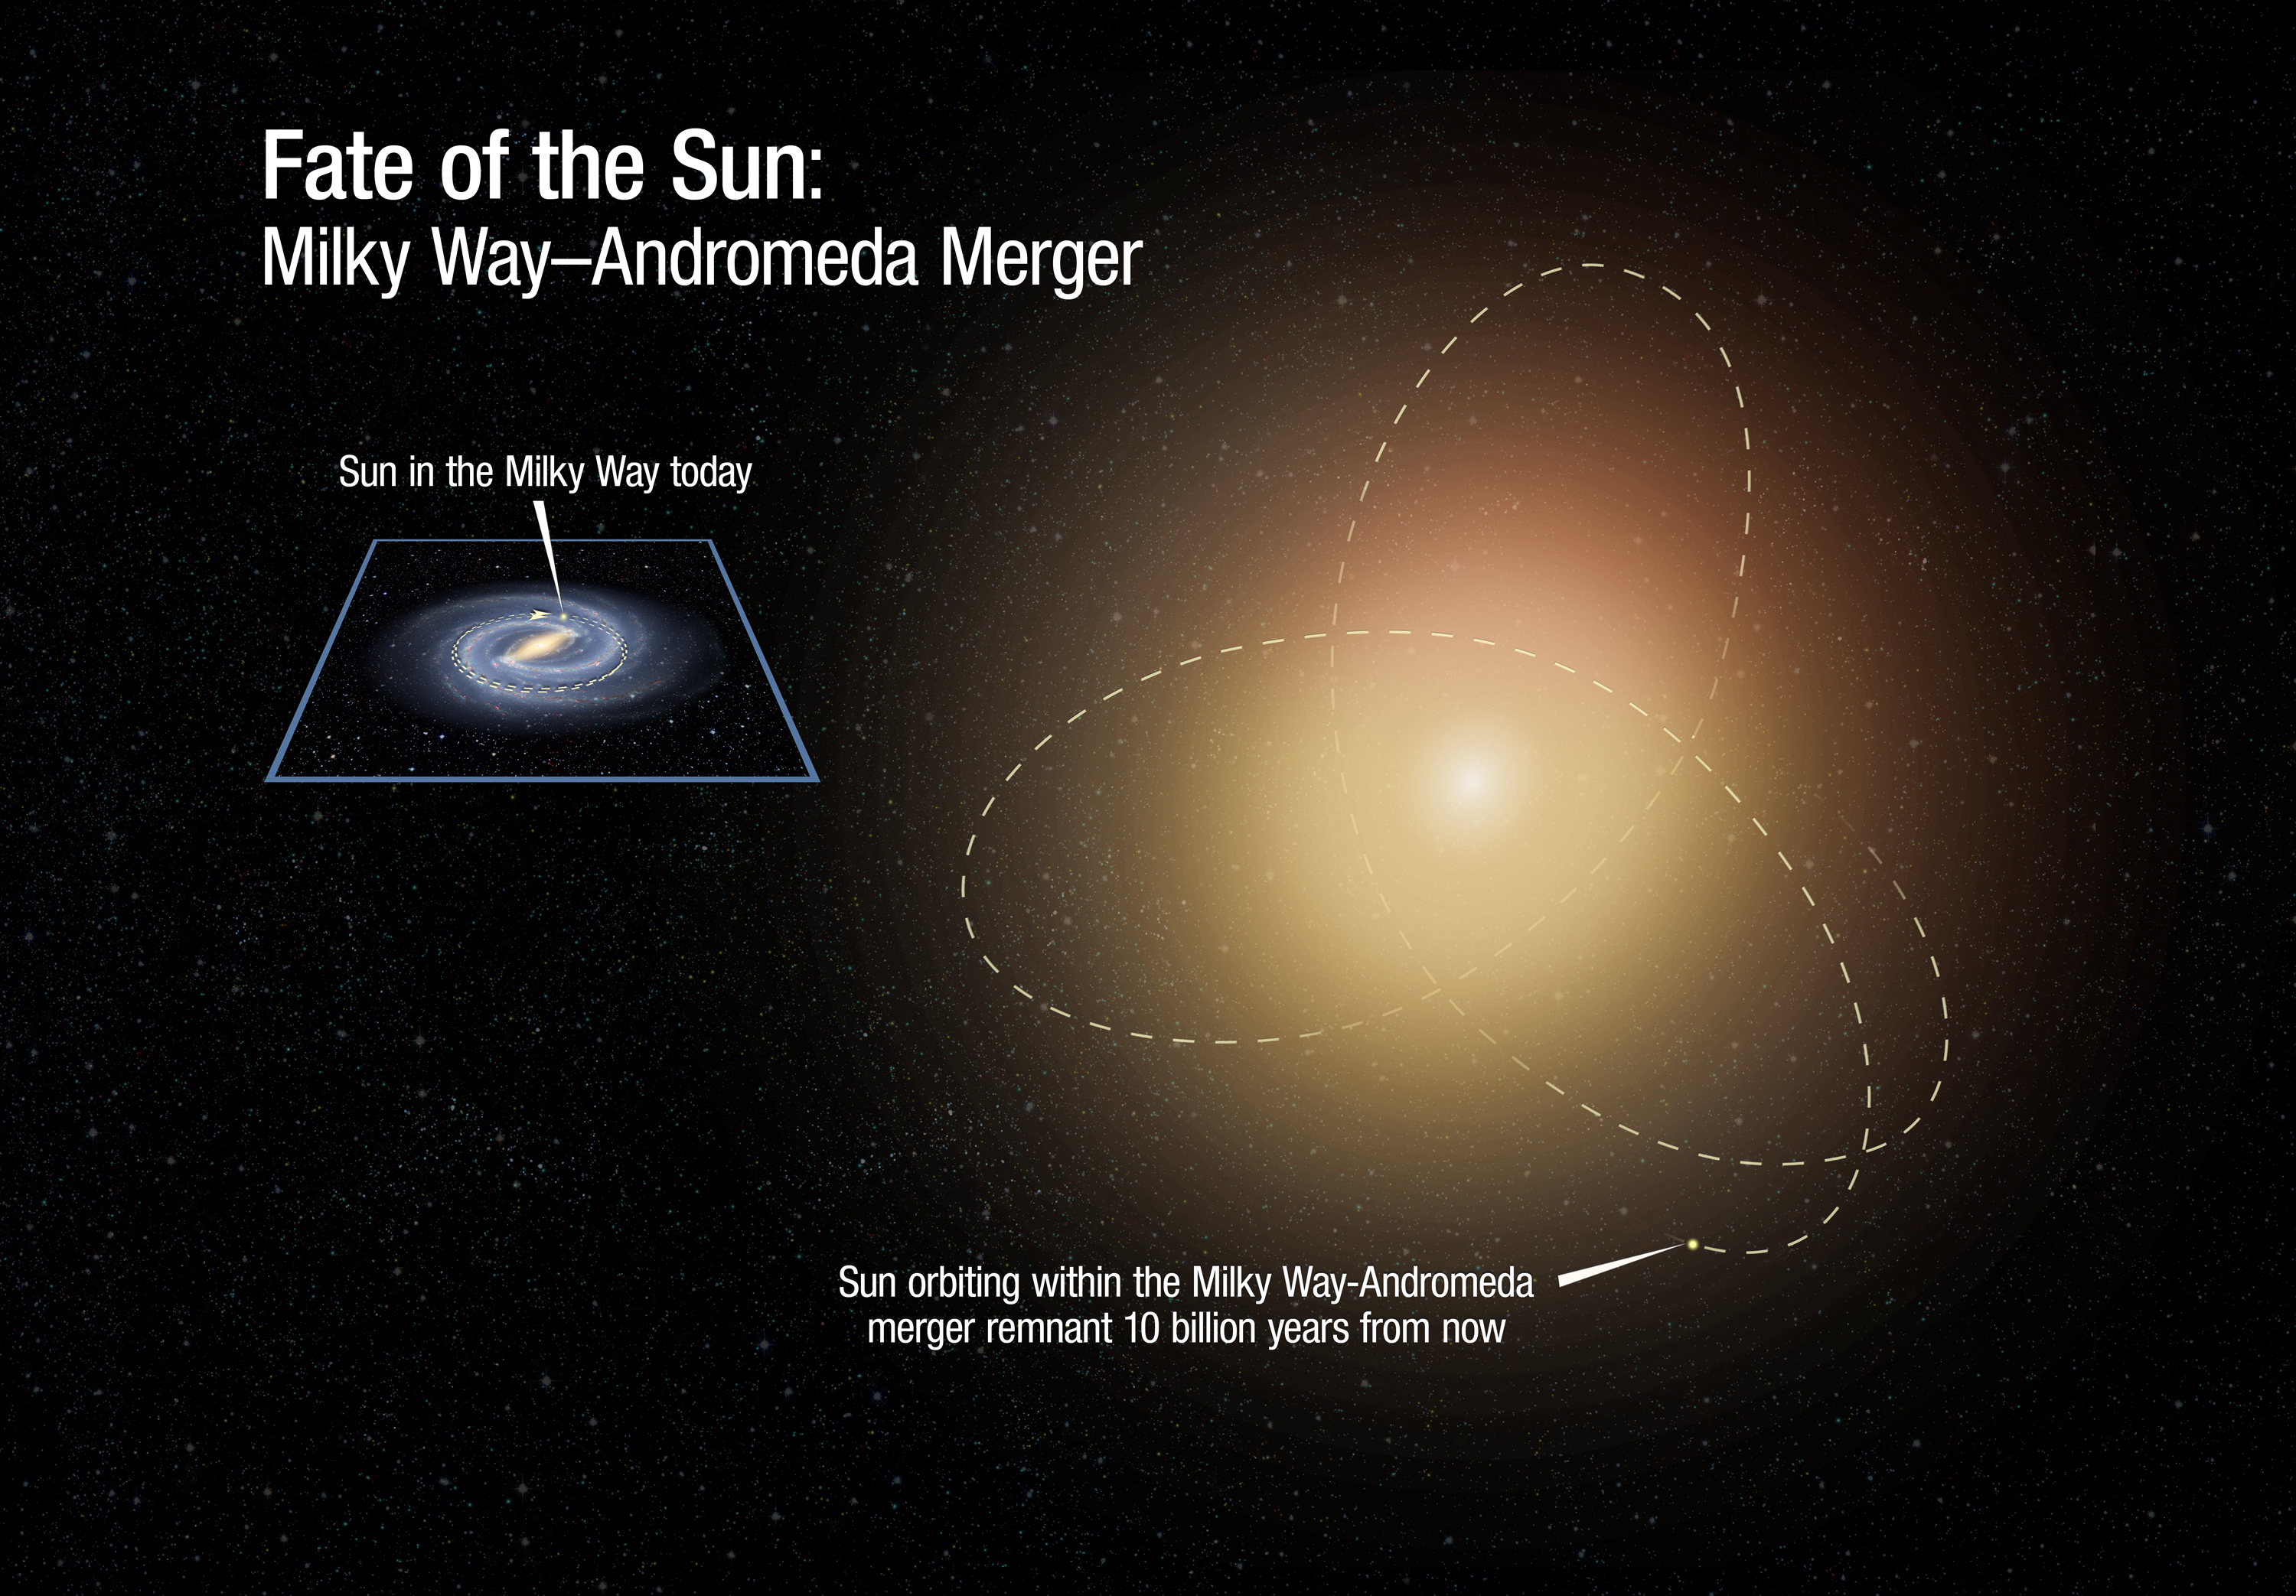

Fate of Sun After Galaxy Collision

This illustration is a before-and-after comparison of the size of our Milky Way galaxy at present, and after it fully completes a merger with the neighbouring Andromeda galaxy 10 billion years from now. The merged galaxies will blend together to create an elliptical galaxy of aging stars. Our Sun now orbits in the Milky Way's disk. But after the merger, it likely will be tossed into a looping orbit that will bring it both nearer to the centre and farther into the outskirts of the newly formed elliptical galaxy.

Credit: NASA, ESA, and A. Feild and R. van der Marel (STScI)